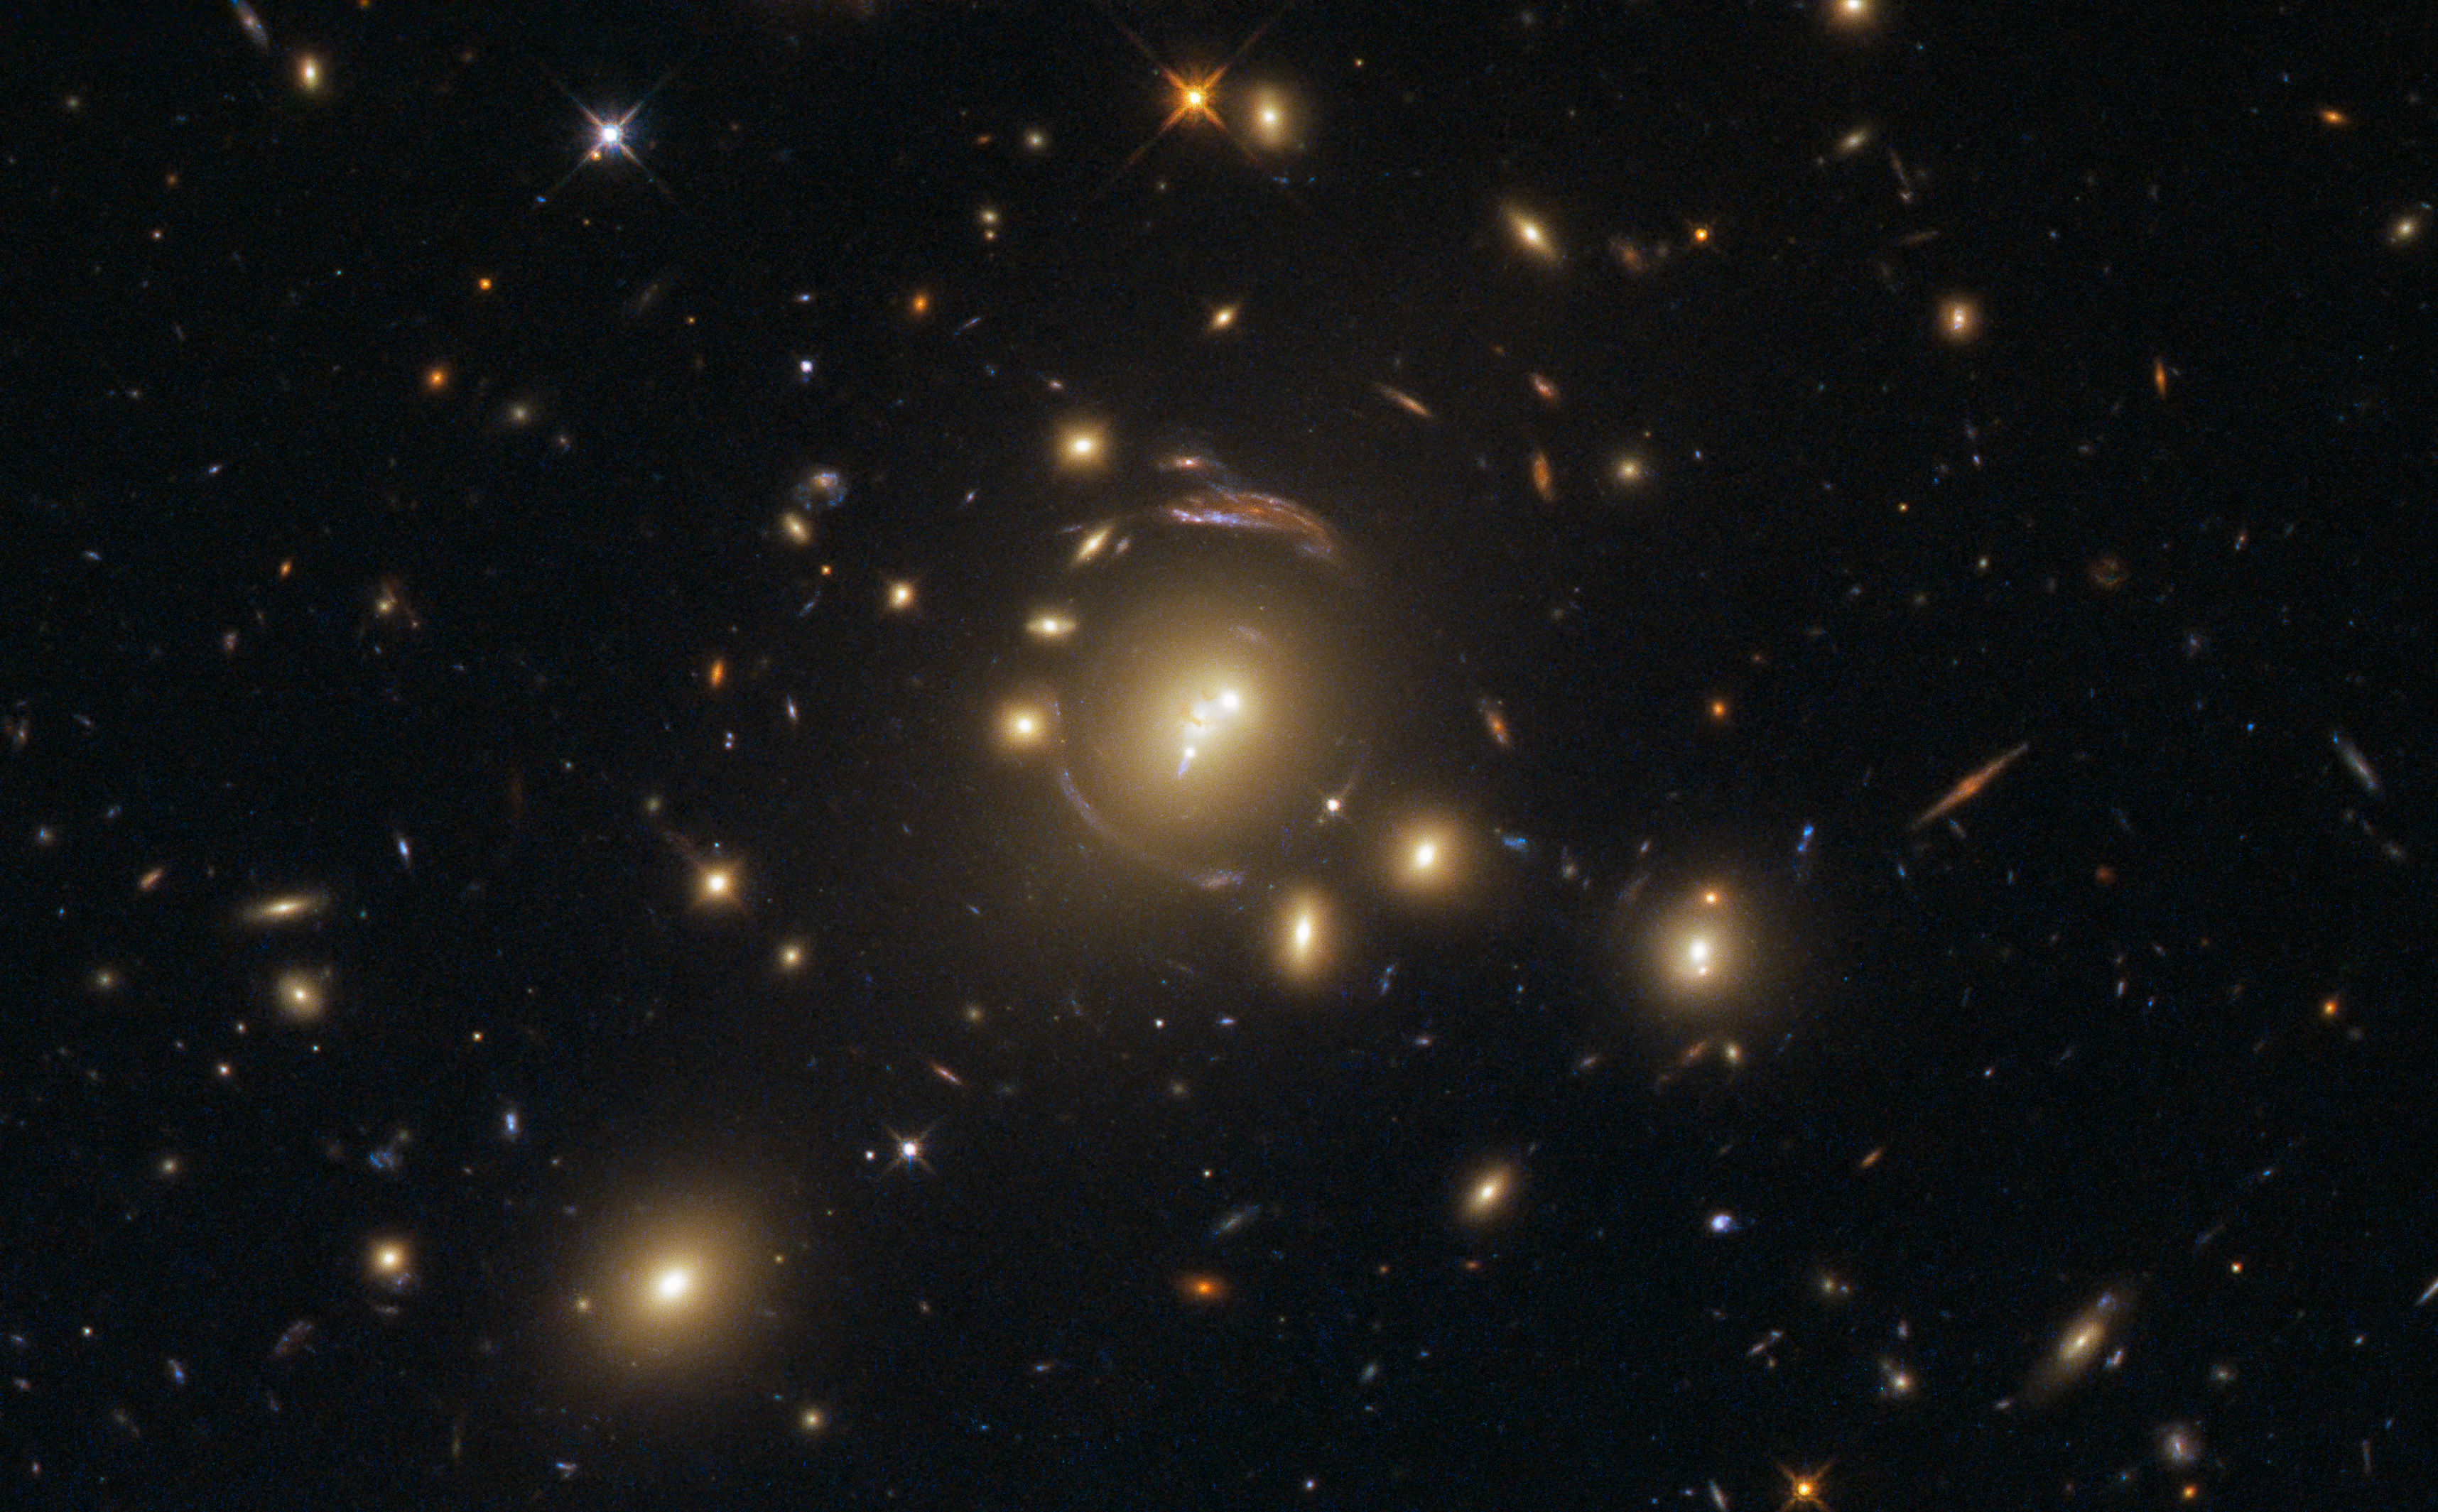

Major mergers

At first glance, it may seem as though this image was taken through a faulty lens, but the mind-bending distortions visible in this Hubble Wide Field Camera 3 impressive image are actually caused by a cosmic phenomenon.

The bright object at the centre of the frame is the galaxy cluster SDSS J1336-0331. The enormous gravitational influence of the cluster warps the very shape and fabric of its environment (the spacetime around it) creating an effect known as strong gravitational lensing. Through this the light from background galaxies in the line of sight to the observer are bent into fantastic arcs. This effect is very useful for studying distant background galaxies.

Moreover SDSS J1336-0331 is interesting in itself: the cluster was part of a study of star formation within 42 of the Brightest Cluster Galaxies (BCGs — the brightest galaxies within their host clusters, as the name would suggest). Typically located in the centres of their clusters, BCGs are among the most massive and luminous galaxies in the Universe. They are generally huge elliptical galaxies and are likely to host active galactic nuclei (AGN) in their cores. The study found evidence to suggest that BCGs are fueled by cold gas from the galaxy. It also showed that star formation in older BCGs no longer significantly contributes to the galaxy’s growth; instead, the stellar growth occurs through mergers, the collision of two galaxies. Violent, gas-rich major mergers can trigger intense bursts of star formation in their aftermath.

Credit: ESA/Hubble & NASA